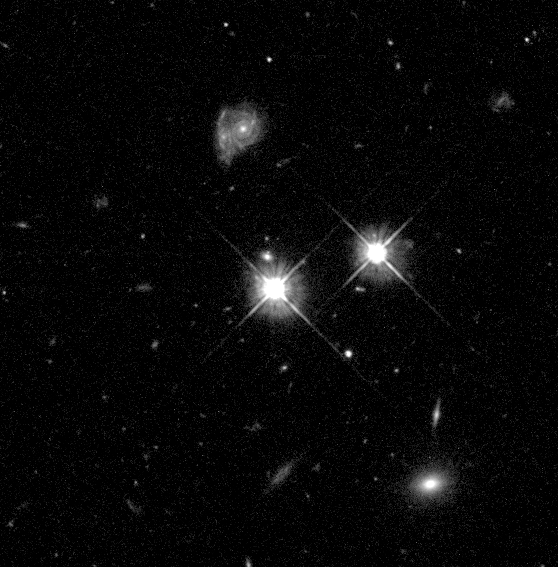

Hubble's 100,000th Exposure

The Hubble Space Telescope achieved its 100, 000th exposure June 22 with a snapshot of a quasar that is about 9 billion light-years from Earth.

The Wide Field and Planetary Camera 2clicked this image of the quasar, the bright object in the center of the photo. The fainter object just above it is an elliptical galaxy. Although the two objects appear to be close to each other, they are actually separated by about 2 billion light-years. Located about 7 billion light-years away, the galaxy is almost directly in front of the quasar.

Credit: Charles Steidel (California Institute of Technology, Pasadena, CA) and NASA/ESA